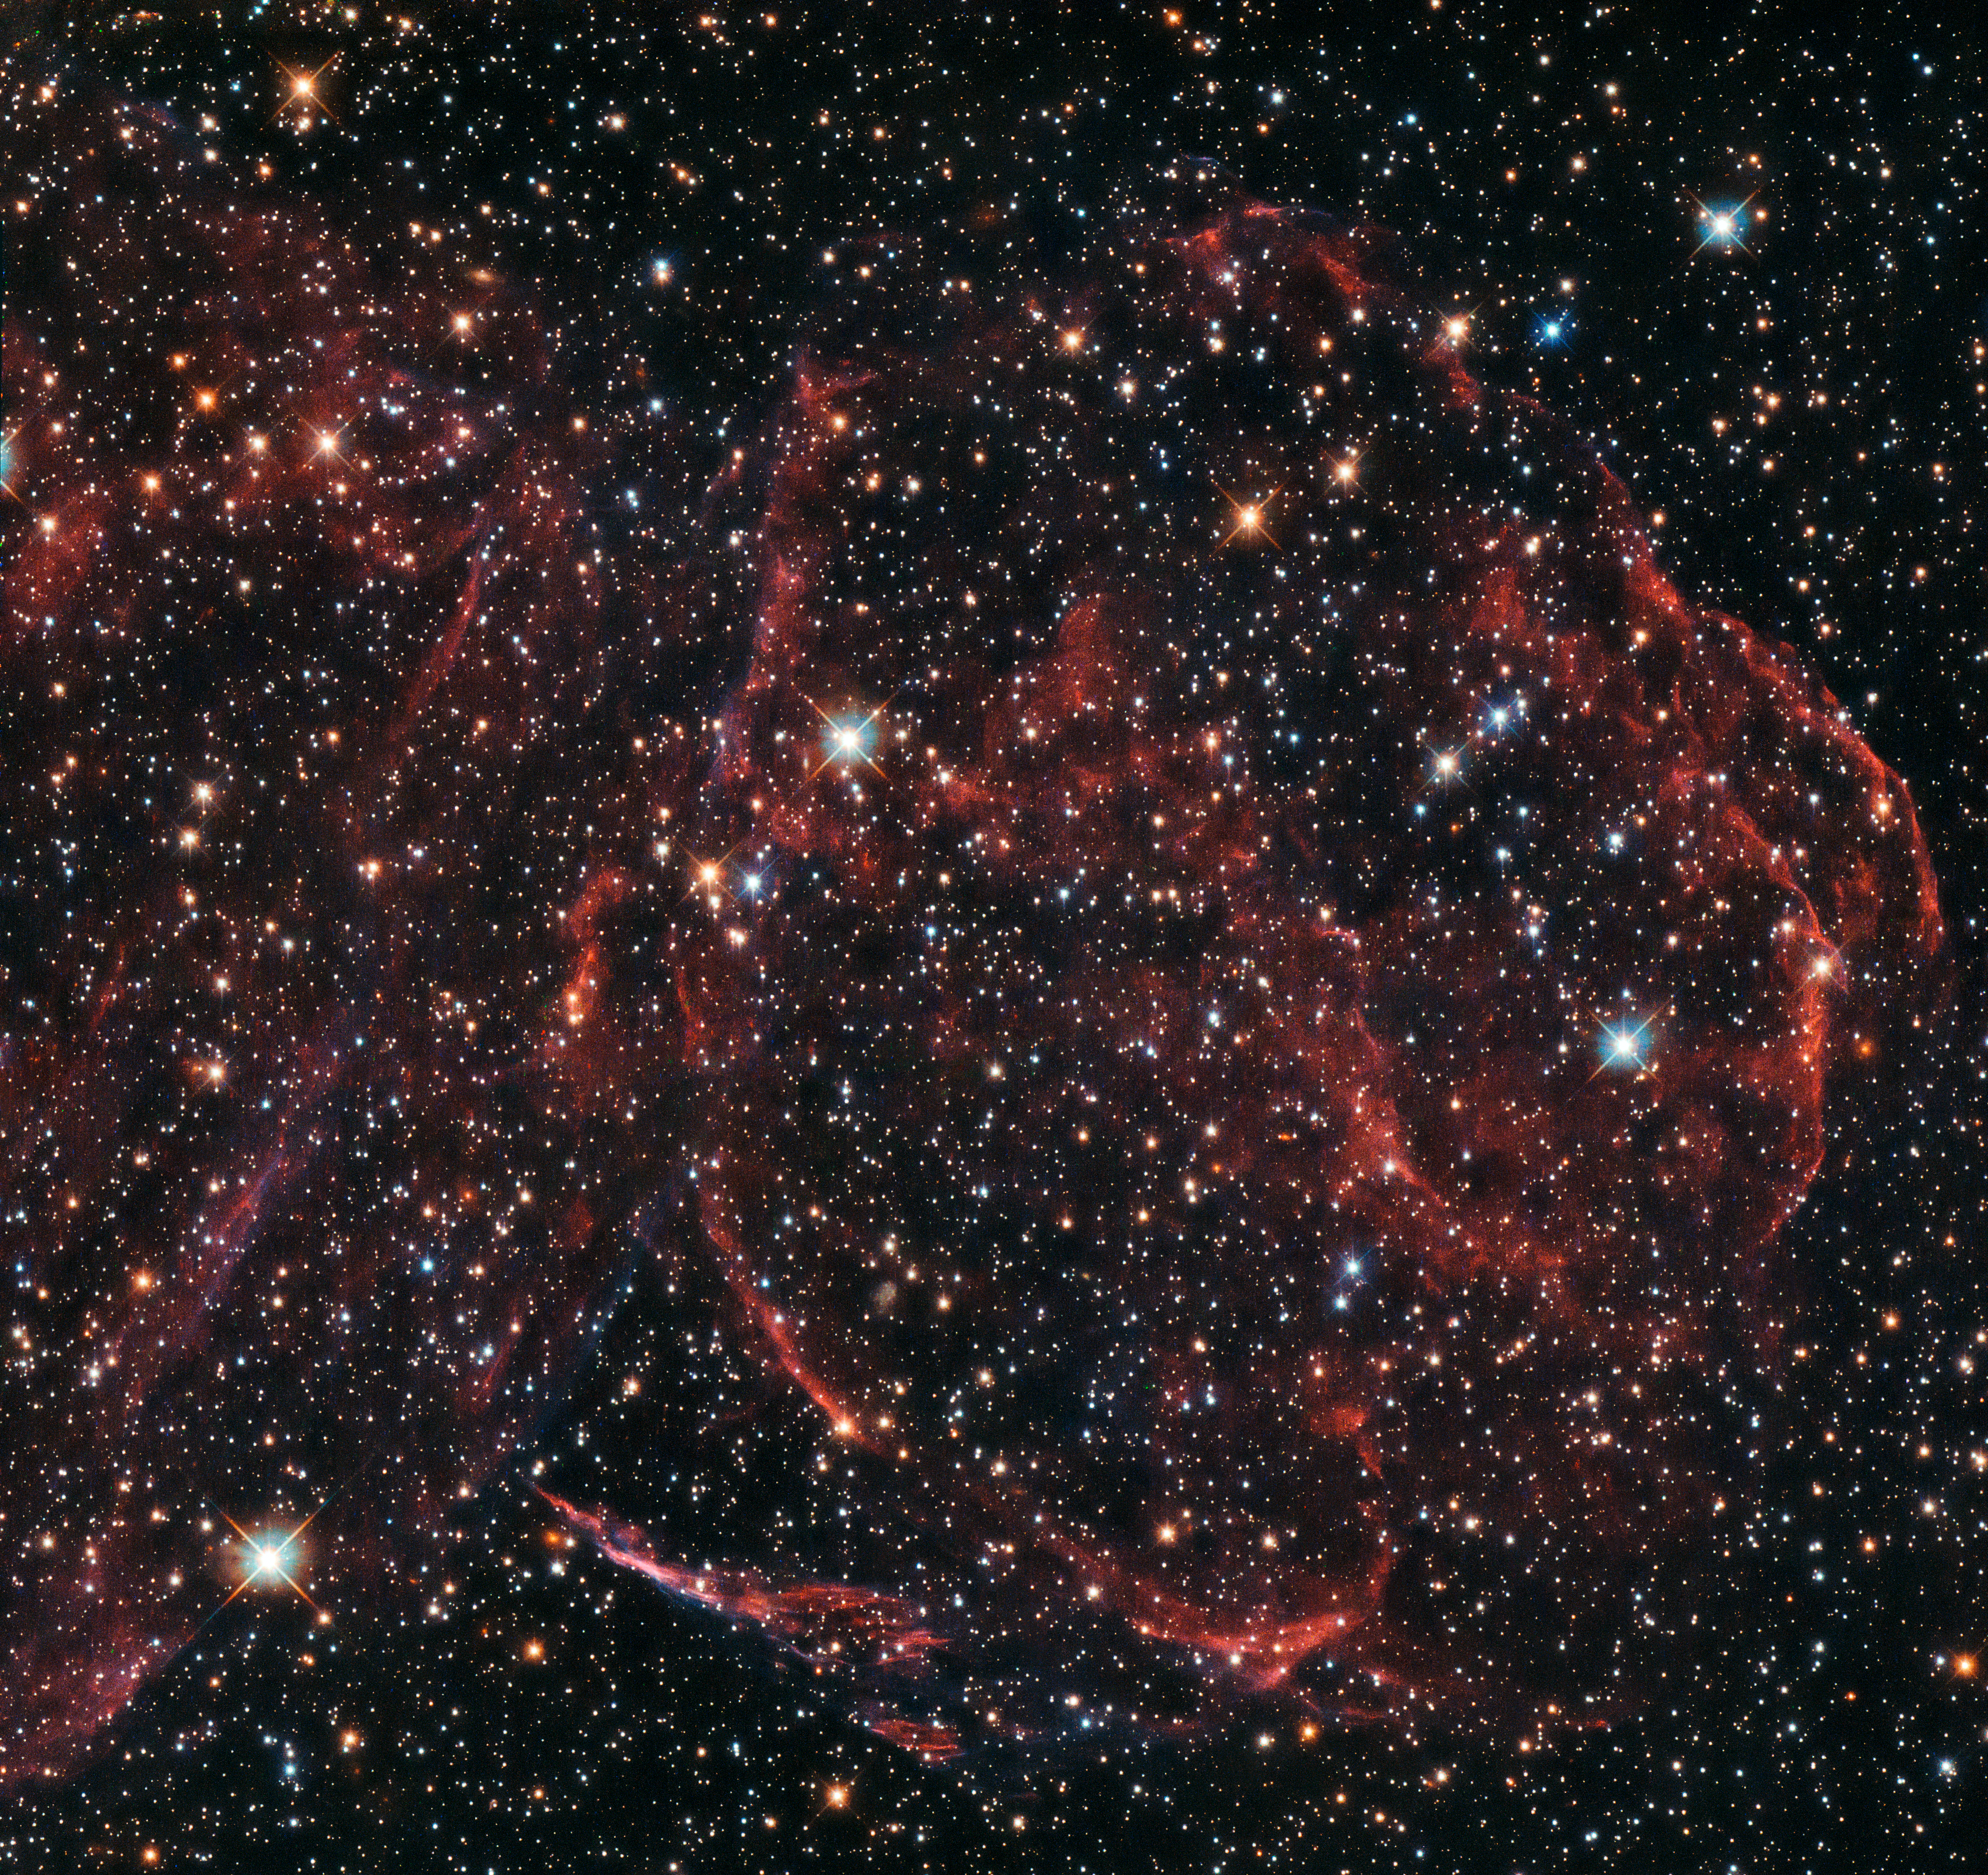

A long-dead star

This NASA/ESA Hubble Space Telescope image captures the remnants of a long-dead star. These rippling wisps of ionised gas, named DEM L316A, are located some 160 000 light-years away within one of the Milky Way’s closest galactic neighbours — the Large Magellanic Cloud (LMC).

The explosion that formed DEM L316A was an example of an especially energetic and bright variety of supernova, known as a Type Ia. Such supernova events are thought to occur when a white dwarf star steals more material than it can handle from a nearby companion, and becomes unbalanced. The result is a spectacular release of energy in the form of a bright, violent explosion, which ejects the star’s outer layers into the surrounding space at immense speeds. As this expelled gas travels through the interstellar material, it heats it up and ionise it, producing the faint glow that Hubble’s Wide Field Camera 3 has captured here.

The LMC orbits the Milky Way as a satellite galaxy and is the fourth largest in our group of galaxies, the Local Group. DEM L316A is not alone in the LMC; Hubble came across another one in 2010 with SNR 0509 (heic1018), and in 2013 it snapped SNR 0519 (potw1317a).

Credit: ESA/Hubble & NASA, Y. Chu